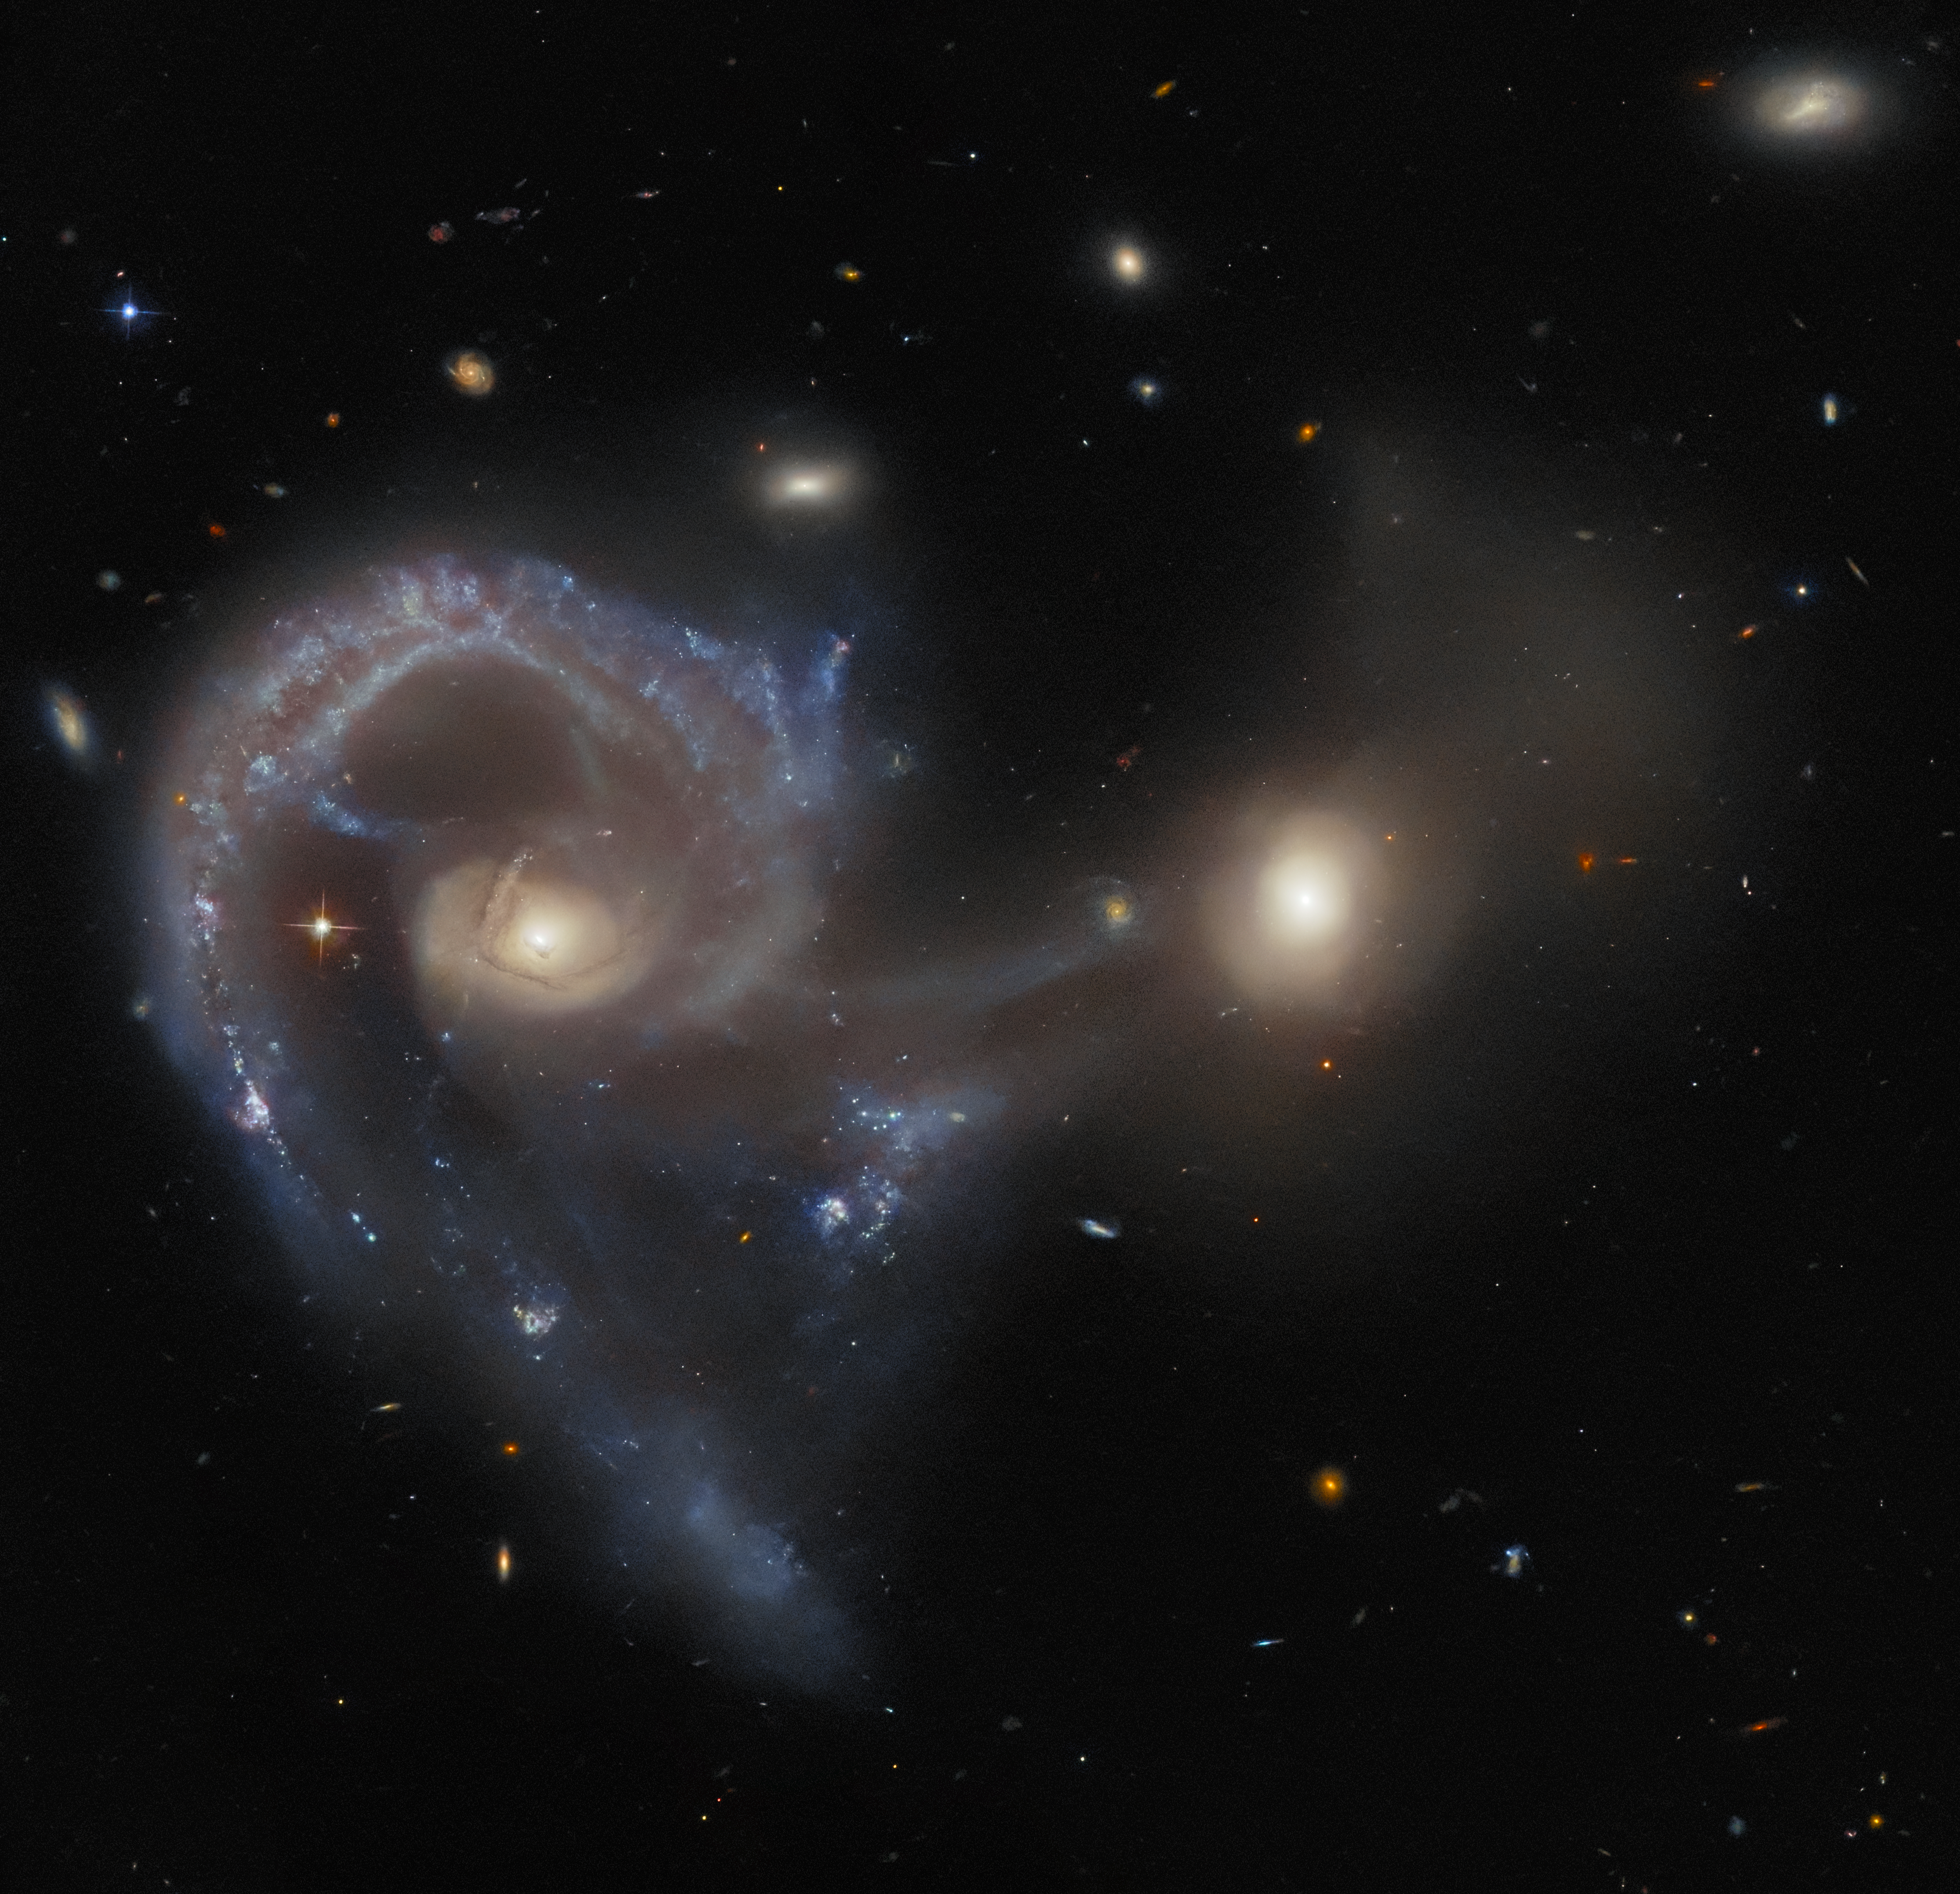

A peculiar proceeding

This Hubble Picture of the Week — taken using the NASA/ESA Hubble Space Telescope’s Advanced Camera for Surveys (ACS) — shows Arp 107, a celestial object that comprises a pair of galaxies in the midst of a collision. The larger galaxy (on the left of this image) is an extremely energetic galaxy of a type known as a Seyfert galaxy, which house active galactic nuclei at their cores. Seyfert galaxies are notable because, despite the immense brightness of the active core, radiation from the entire galaxy can be observed. This is evident in this image, where the spiraling whorls of the whole galaxy are readily visible. The smaller companion is connected to the larger by a seemingly tenuous ‘bridge’, composed of dust and gas. The colliding galactic duo lies about 465 million light-years from Earth.

Arp 107 is included in a catalogue of 338 galaxies known as the Atlas of Peculiar Galaxies, which was compiled in 1966 by Halton Arp. It was observed by Hubble as part of an observing programme that specifically sought to fill in an observational ‘gap’, by taking limited observations of members of the Arp catalogue. Part of the intention of the observing programme was to provide the public with images of these spectacular and not-easily-defined galaxies, and it has provided a rich source for Hubble Pictures of the Week. In fact, several recent releases, including this one and this one, have made use of observations from the same observing programme.

Credit: ESA/Hubble & NASA, J. Dalcanton, Dark Energy Survey/DOE/FNAL/NOIRLab/NSF/AURA, SDSS